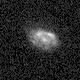

Galaxies: snapshots in time

Single images from the Galaxies: Snapshots in Time collage.

Credit: NASA & ESA